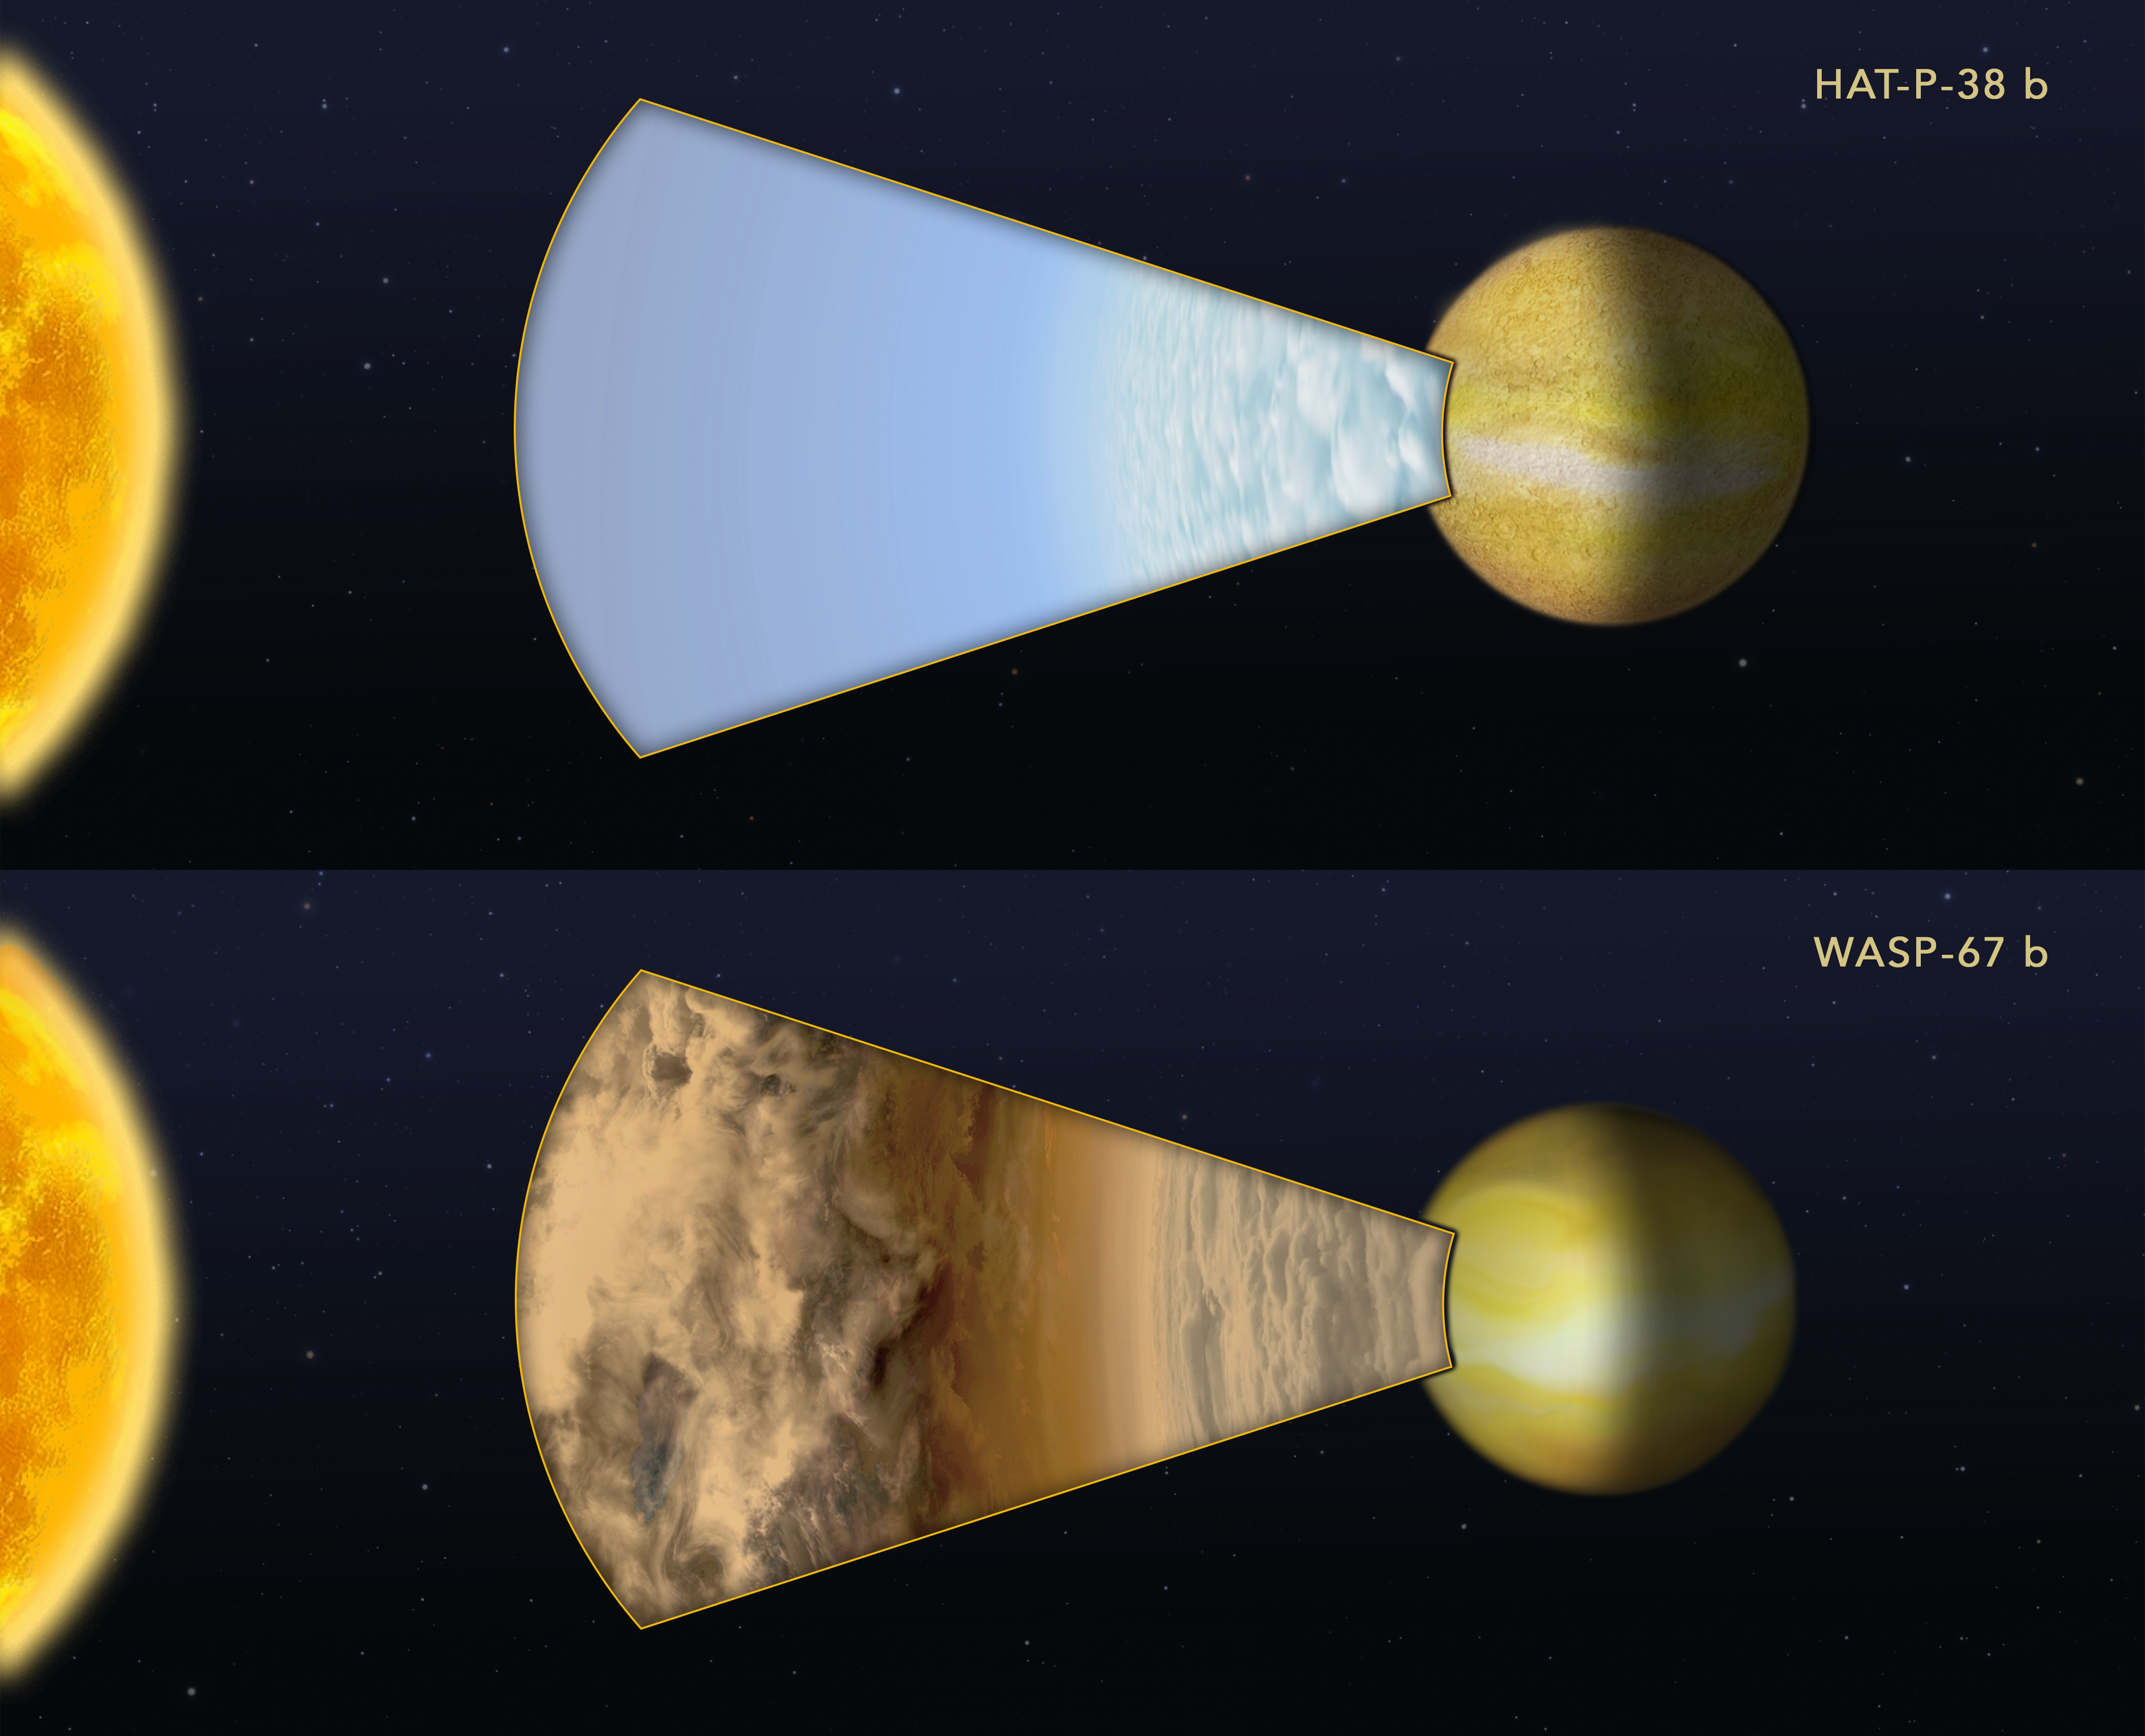

Cloudy versus clear atmospheres on two exoplanets

This illustration compares the atmospheres of two "hot Jupiter"-class exoplanets orbiting very closely to different sunlike stars. The planets are too far away for the NASA/ESA Hubble Space Telescope to resolve any details. Instead, astronomers measured how the light from the parent stars is filtered through each planet's atmosphere. Hubble was used to measure the spectral fingerprint caused by the presence of water vapor in the atmosphere. The planet HAT-P-38 b did have a water signature, indicating the upper atmosphere is free of clouds or hazes. By contrast, a very similar hot Jupiter, WASP-67 b, showed no water vapor, suggesting that most of the planet's atmosphere is masked by high-altitude clouds.

These results are not peer-reviewed and were presented at the 230th meeting of the AAS.

Credit: NASA, ESA, and Z. Levy (STScI)